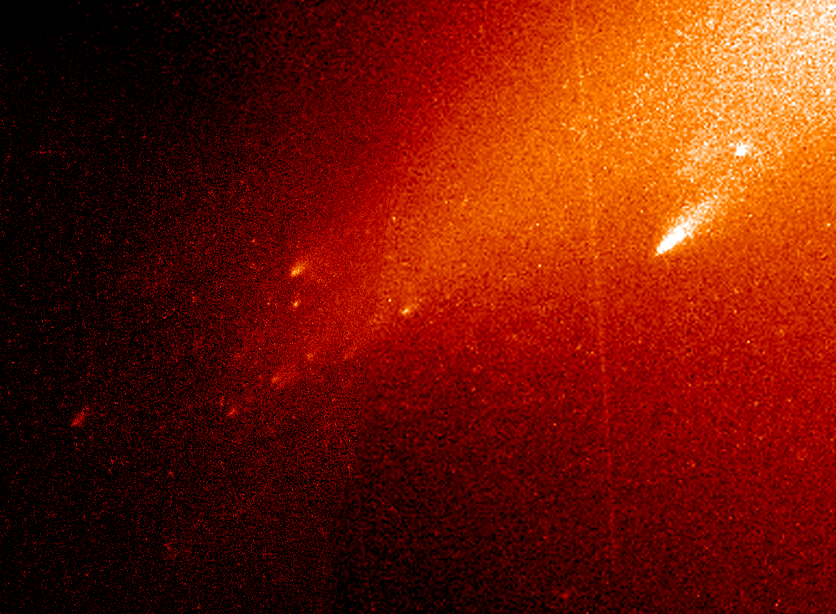

Comet LINEAR

Astronomers analyzing debris from a comet that broke apart lastsummer spied pieces as small as smoke-sized particles and aslarge as football-field-sized fragments. But it's the materialthey didn't see that has aroused their curiosity. Tracking thedoomed comet, named LINEAR, the Hubble telescope and the VeryLarge Telescope in Chile found tiny particles that made up the 2,000-mile-long dust tail and 16 large fragments, some as wide as330 feet. But the telescopes didn't detect any intermediate-sized pieces. If they exist, then the fundamental building blocks that comprised LINEAR's nucleus may be somewhat smaller than currenttheories suggest.

The Hubble picture shows that that LINEAR's nucleus has beenreduced to a shower of glowing "mini-comets" resembling the fiery fragments from an exploding aerial firework. This picture was takenwith Hubble's Wide Field Planetary Camera 2 on August 5, 2000, whenthe comet was at a distance of 64 million miles (102 millionkilometers) from Earth.

Credit: NASA/ESA and Hal Weaver (The Johns Hopkins University)